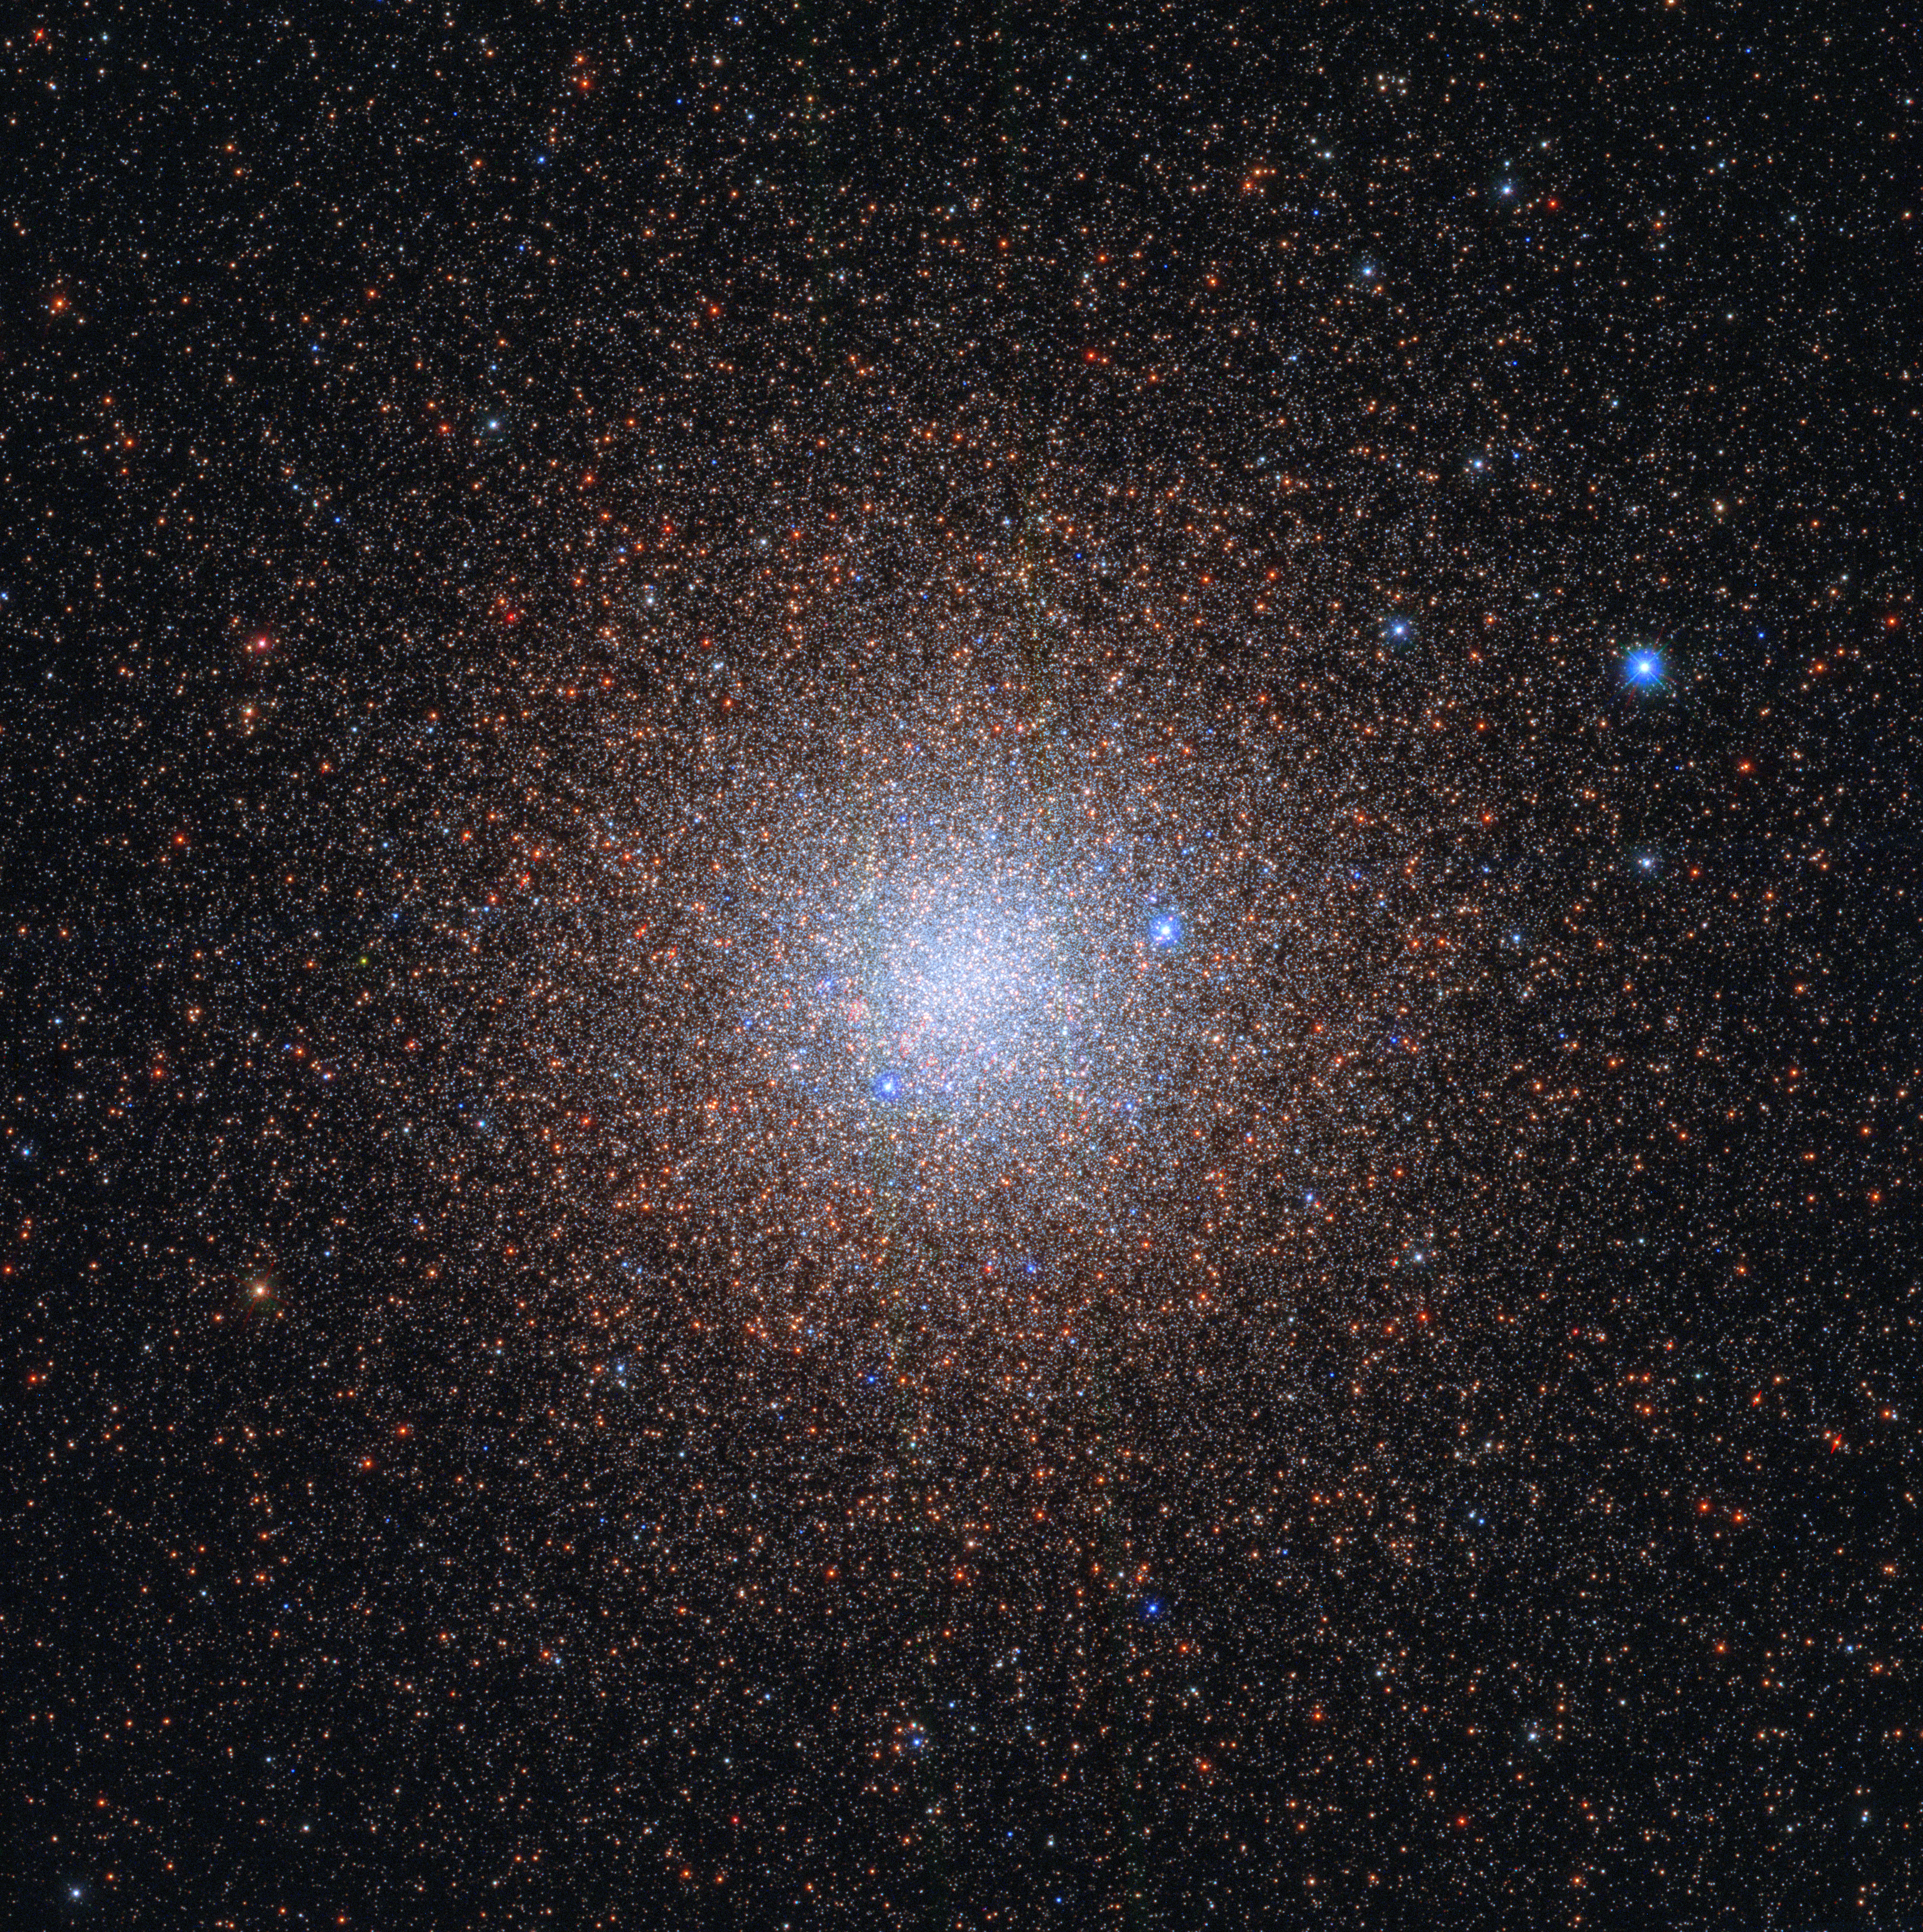

Stellar Snowflakes

Almost like snowflakes, the stars of the globular cluster NGC 6441 sparkle peacefully in the night sky, about 13 000 light-years from the Milky Way’s galactic centre. Like snowflakes, the exact number of stars in such a cluster is difficult to discern. It is estimated that together the stars weigh 1.6 million times the mass of the Sun, making NGC 6441 one of the most massive and luminous globular clusters in the Milky Way.

NGC 6441 is host to four pulsars that each complete a single rotation in a few milliseconds. Also hidden within this cluster is JaFu 2, a planetary nebula. Despite its name, this has little to do with planets. A phase in the evolution of intermediate-mass stars, planetary nebulae last for only a few tens of thousands of years, the blink of an eye on astronomical timescales.

There are about 150 known globular clusters in the Milky Way. Globular clusters contain some of the first stars to be produced in a galaxy, but the details of their origins and evolution still elude astronomers.

Credit: ESA/Hubble & NASA, G. Piotto